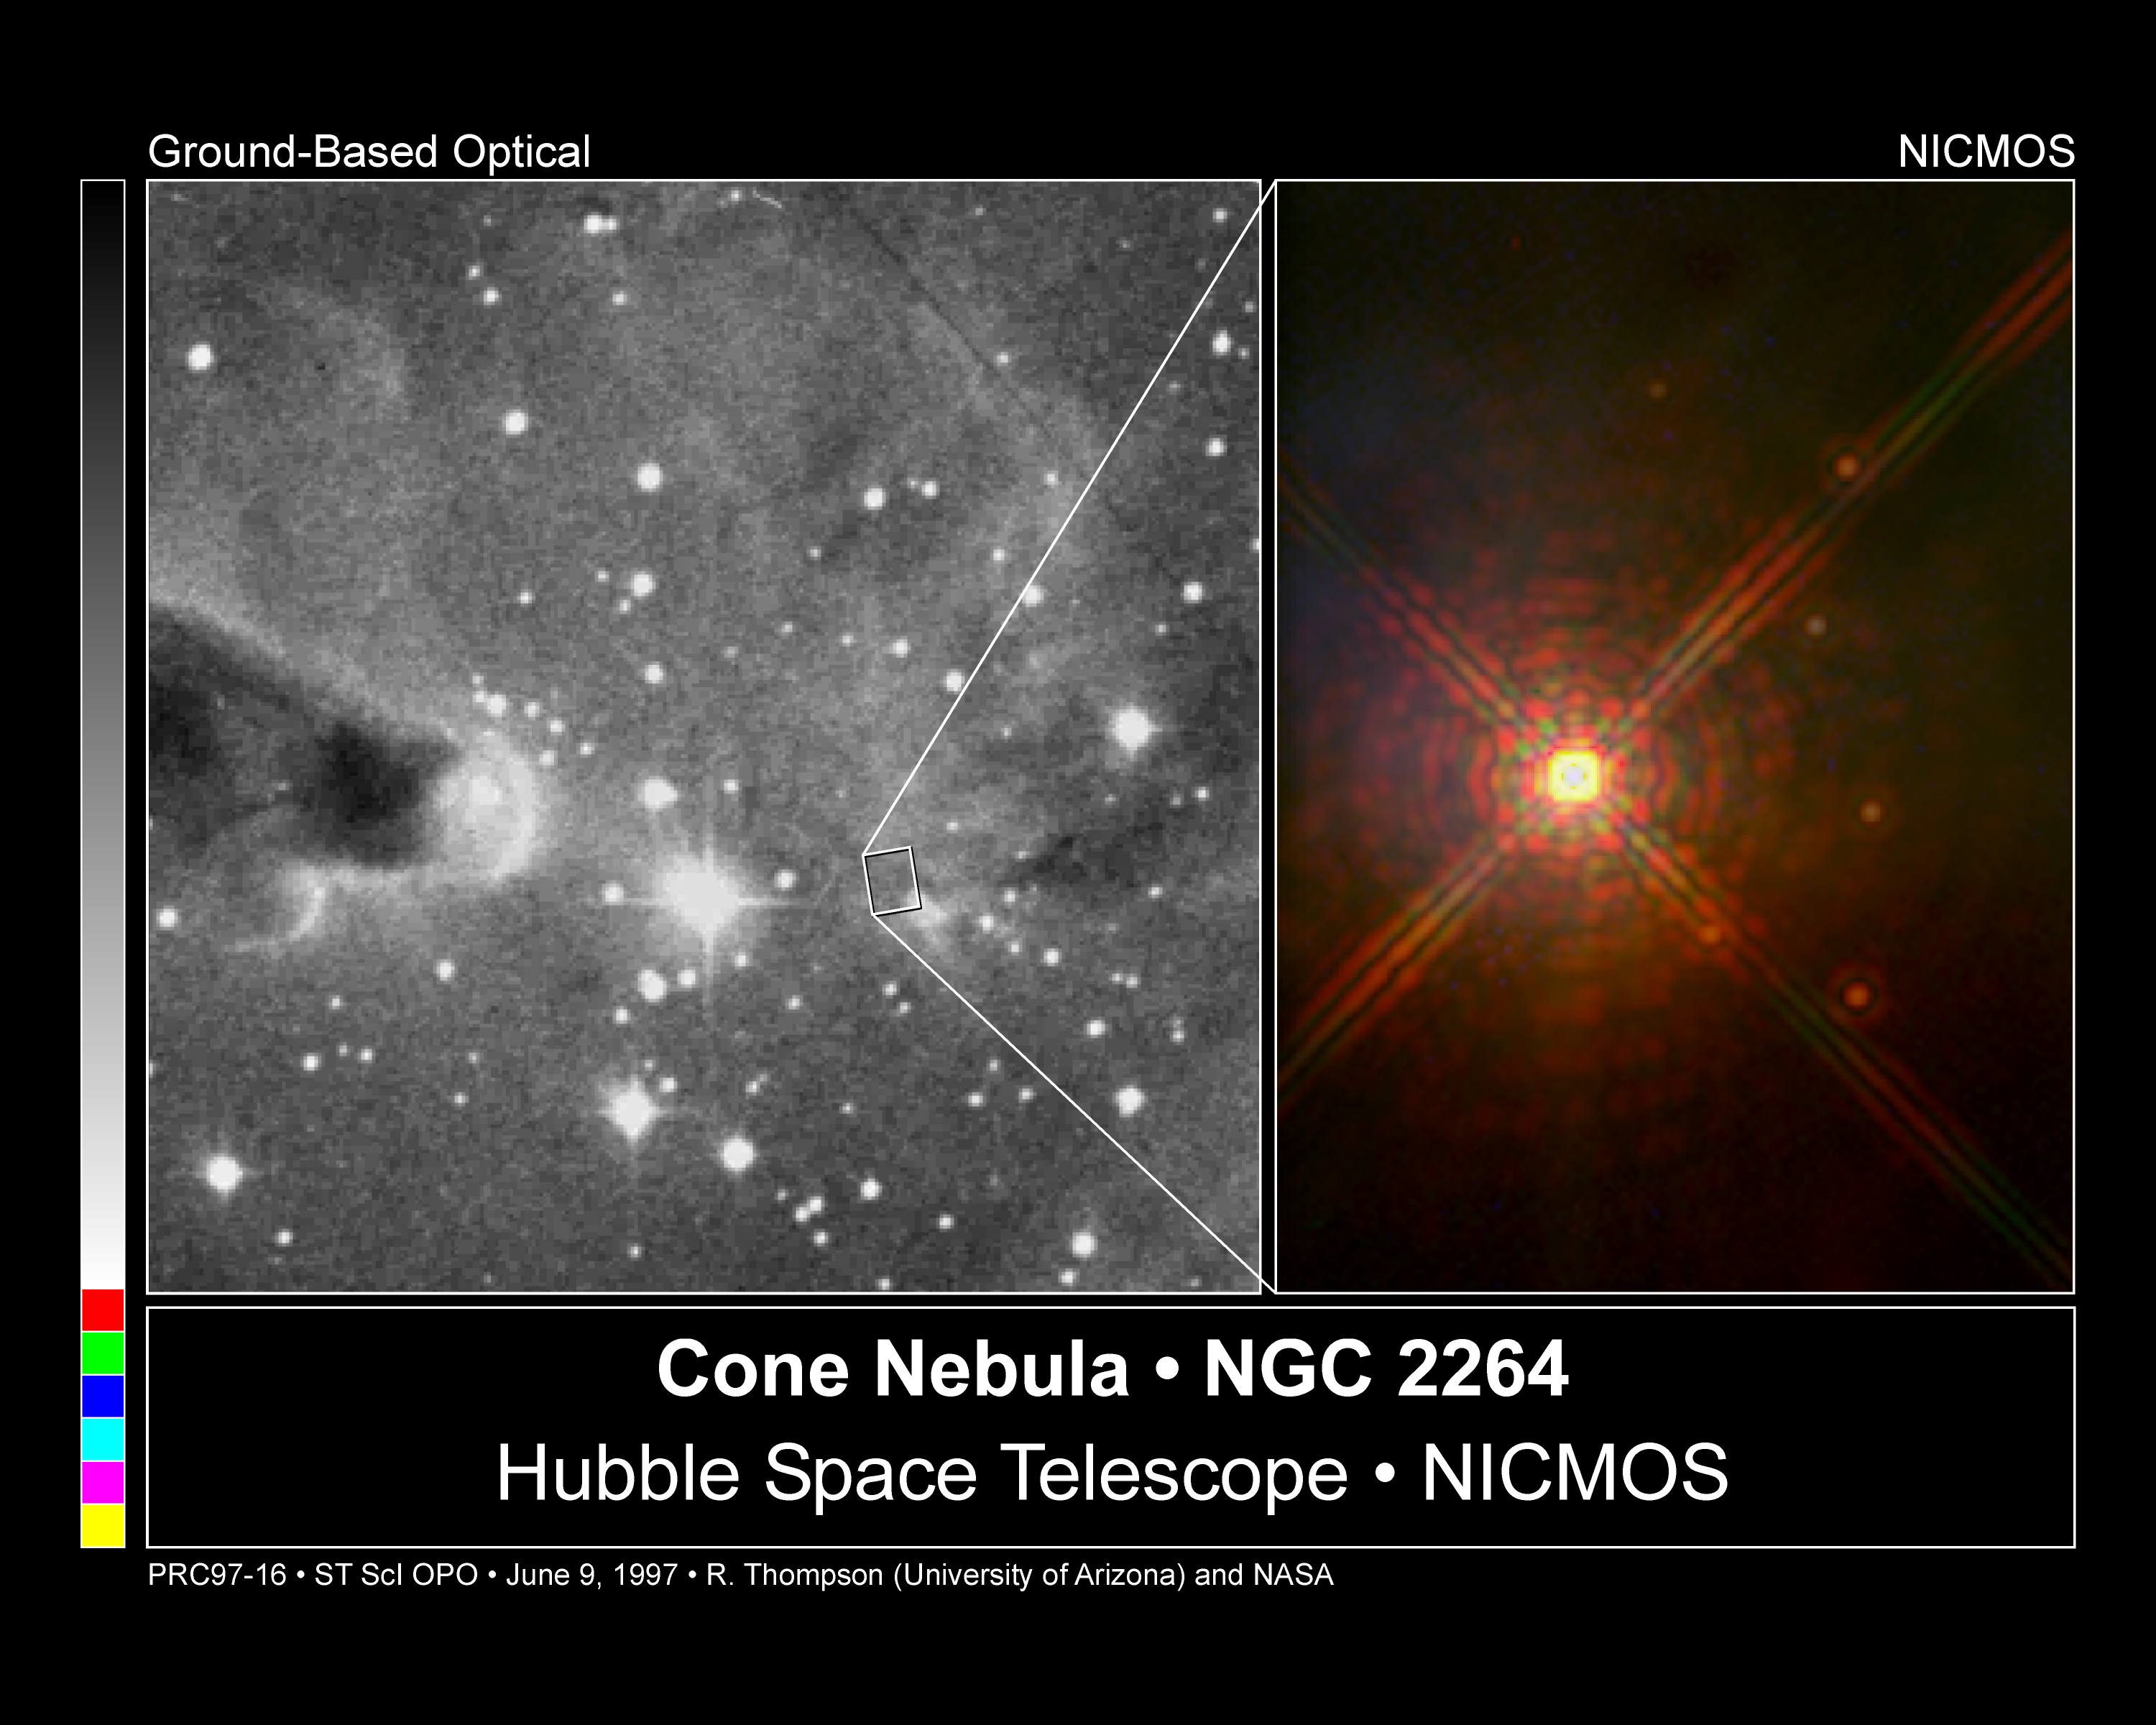

The Cone Nebula NGC 2264

The Hubble Space Telescope's Near Infrared Camera and Multi-Object Spectrometer(NICMOS) has peered into the Cone Nebula, revealing a stunning image of six baby sun-like stars surrounding their mother, a bright, massive star. Known as NGC 2264 IRS, the massive star triggered the creation of these baby stars by releasing high-speed particles of dust and gas during its formative years.

Credit: Rodger Thompson, Marcia Rieke and Glenn Schneider (University of Arizona), and NASA/ESA